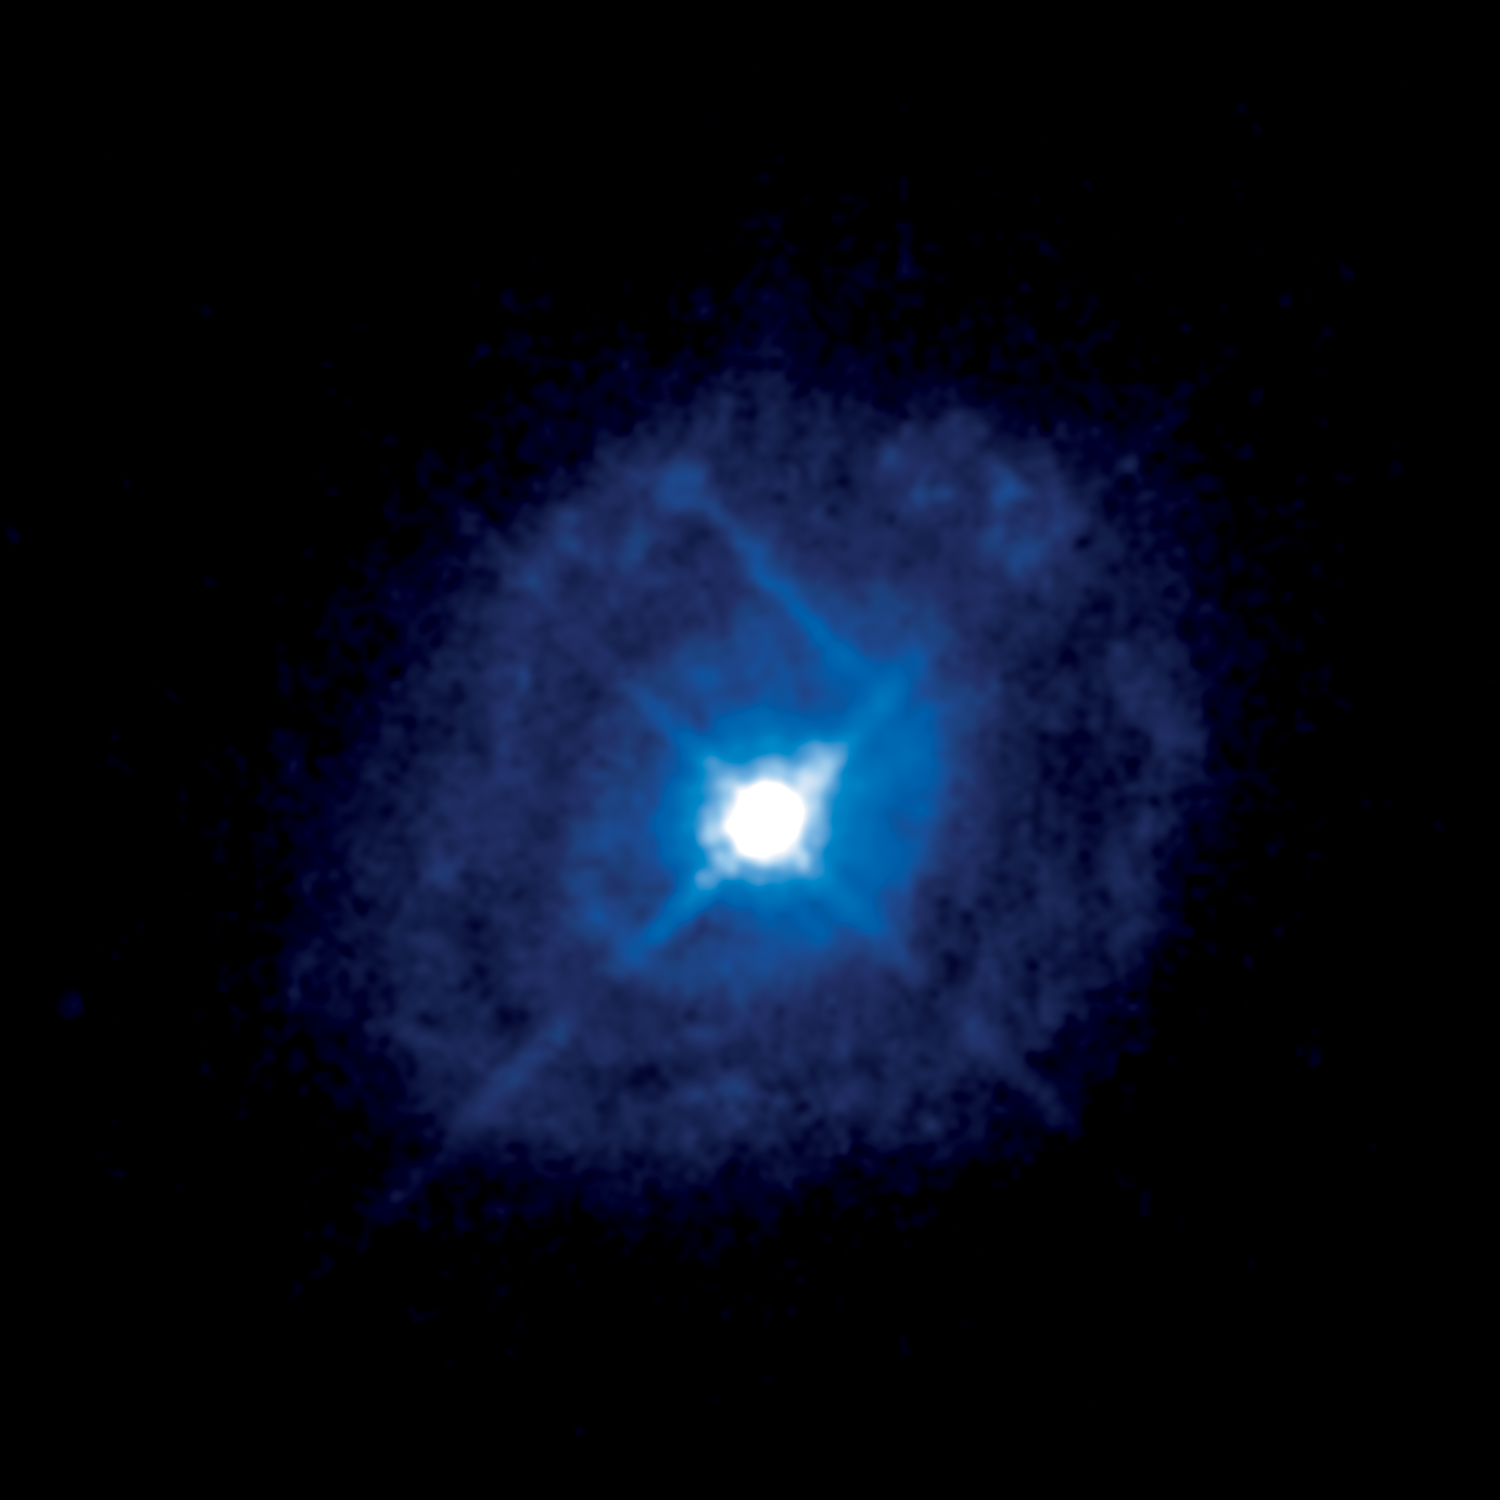

Active galaxy Markarian 509

This image from the NASA/ESA Hubble Space Telescope shows the galaxy Markarian 509. The bright object at the centre of the galaxy, which appears like a star, is an active galactic nucleus. This is a bright celestial phenomenon caused by matter glowing as it falls into a supermassive black hole at the heart of the galaxy.

The surroundings of the black hole in Markarian 509 have been studied in a major campaign which includes the NASA/ESA Hubble Space Telescope, as well as other telescopes in space and on the ground.

Credit: NASA, ESA, J. Kriss (STScI) and J. de Plaa (SRON)